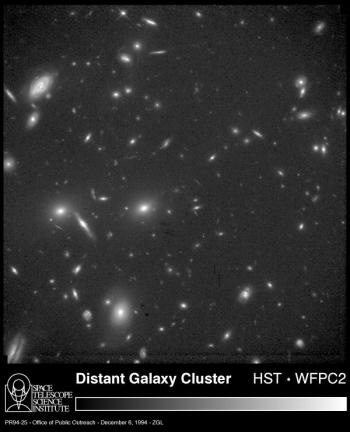

Hubble observes the lost ancestors to our Milky Way Galaxy

This NASA/ESA Hubble Space Telescope (HST) image of the central portion of a remote cluster of galaxies (CL 0939+4713) as it looked when the universe was two-thirds of its present age. Hubble's high resolution allows astronomers to study, for the first time, the shapes of galaxies as they were long ago.

The Space Telescope pictures are sharp enough to distinguish between various forms of spiral galaxies. Most of the spiral, or disk, galaxies have odd features, suggesting they were easily distorted within the environment of the rich cluster. Hubble reveals a number of mysterious "fragments" of galaxies interspersed through the cluster.

Credit: Alan Dressler (Carnegie Institution) and NASA/ESA